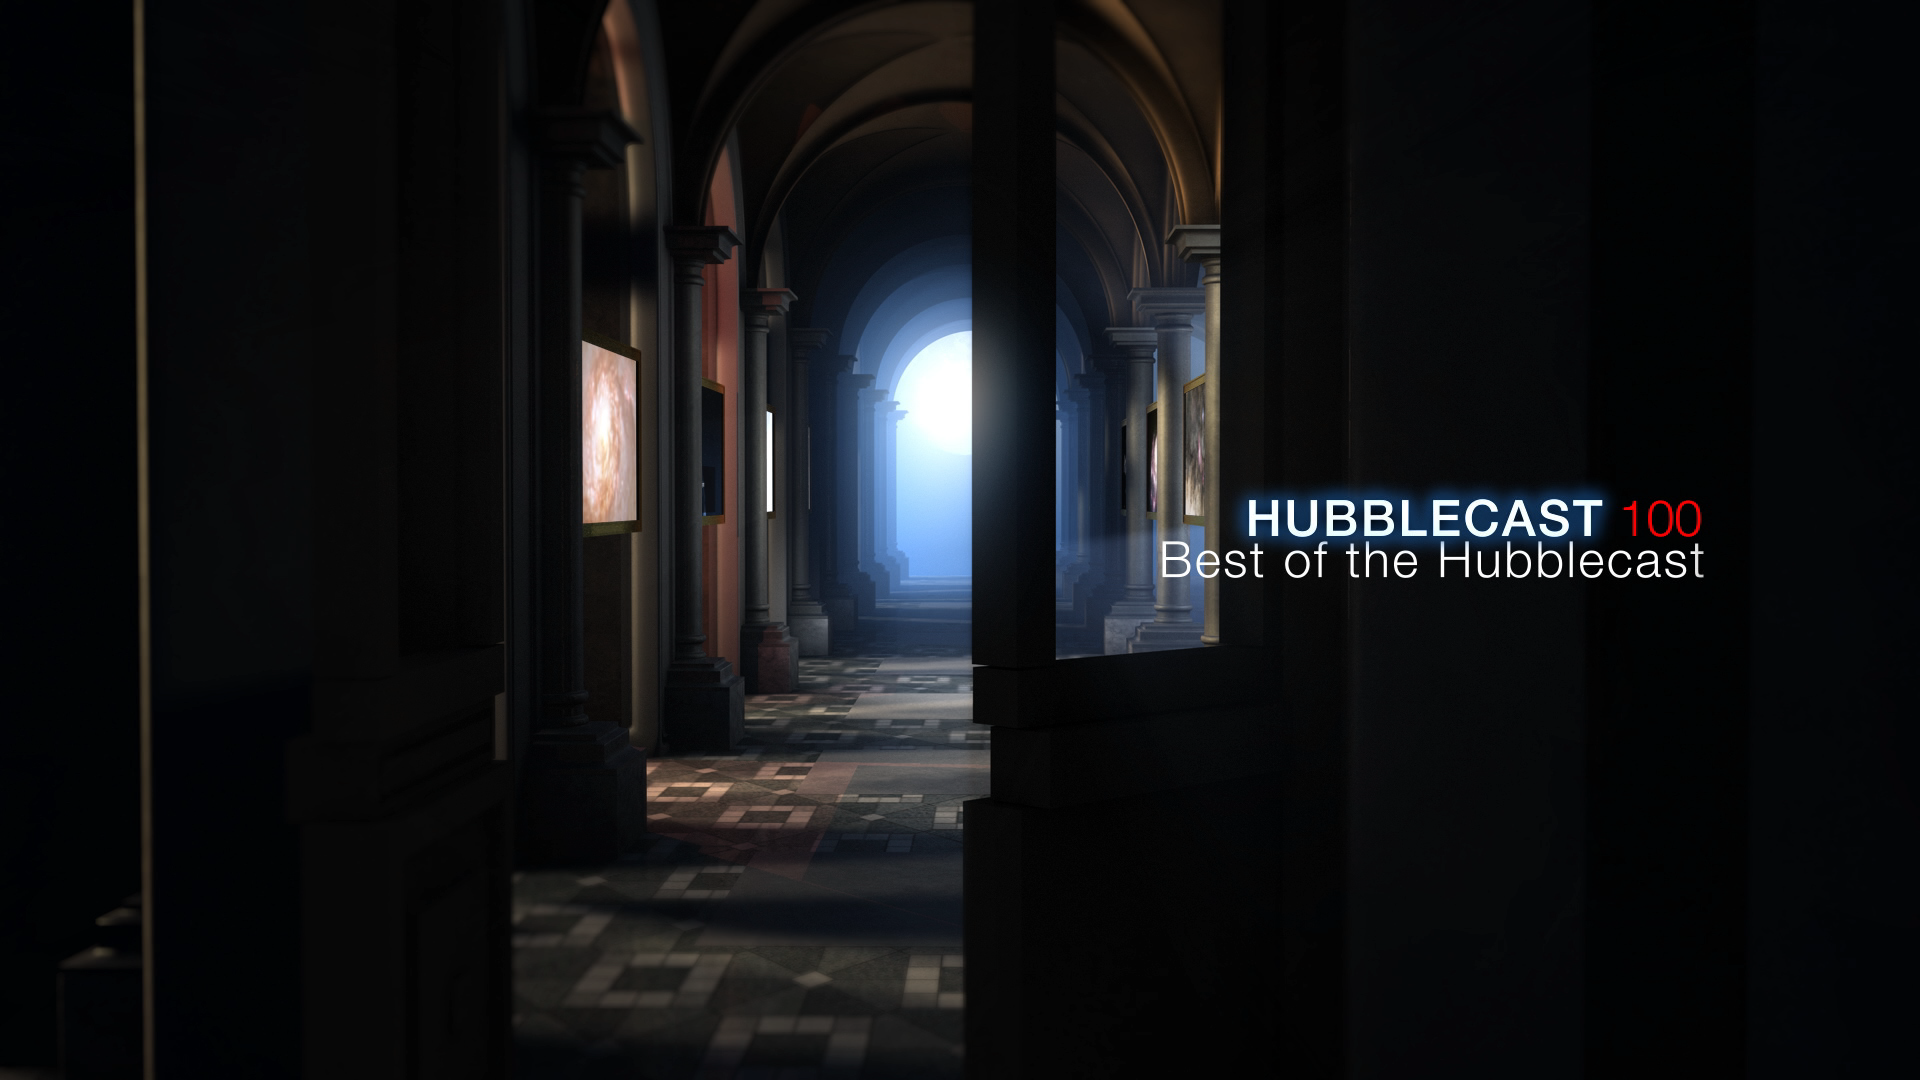

Still from Hubblecast 100: Best of Hubblecast

This is a still from Hubblecast 100.

Credit: ESA/Hubble, NASA